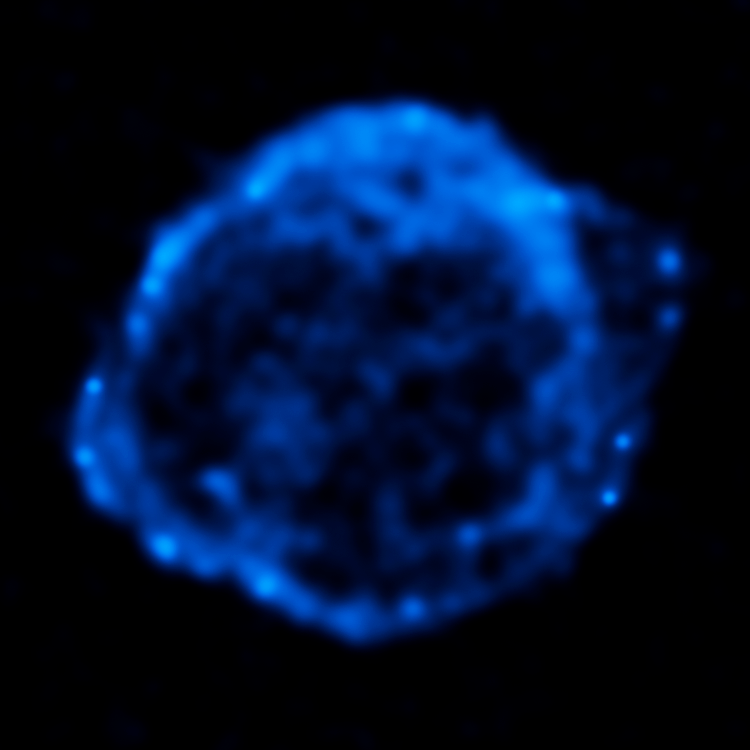

Chandra X-ray Observatory Data of Kepler's Supernova Remnant

This image shows the remains of Kepler's Supernova, the most recent exploding star to be seen in the Milky Way Galaxy. It was first observed 400 years ago when it was thought to be 'a new star'. In fact, it was the the gas and dust from an exploding star, rapidly expanding. These remnants have now reached a diameter of 14 light years wide and are still expanding at 4 million miles per hour.

This image was taken by the Chandra X-ray Observatory and shows the regions of the remains with the hottest gas and highest energy particles.

Credit: NASA, ESA, R. Sankrit and W. Blair (Johns Hopkins University)